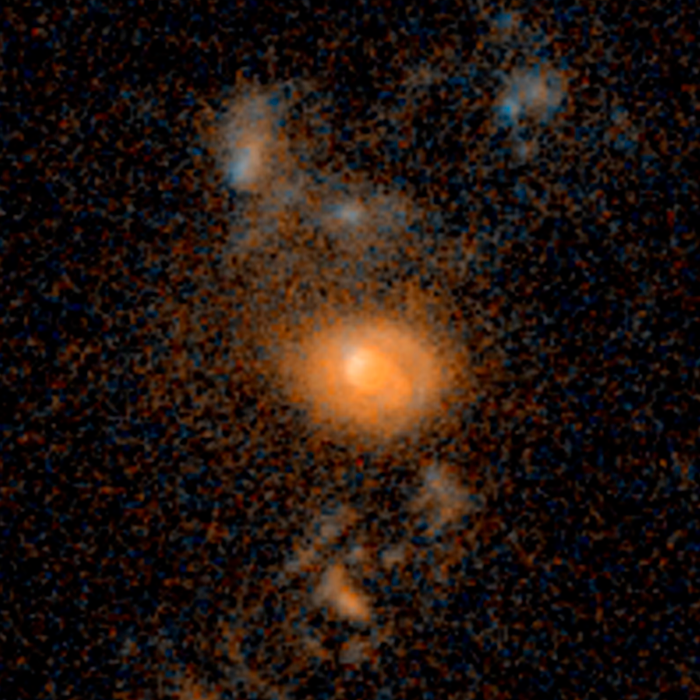

Merging galaxies — 6.2 billion light-years from Earth

Merging galaxies — 6.2 billion light-years from Earth.

Credit: NASA, ESA, and J. Lotz (STScI)